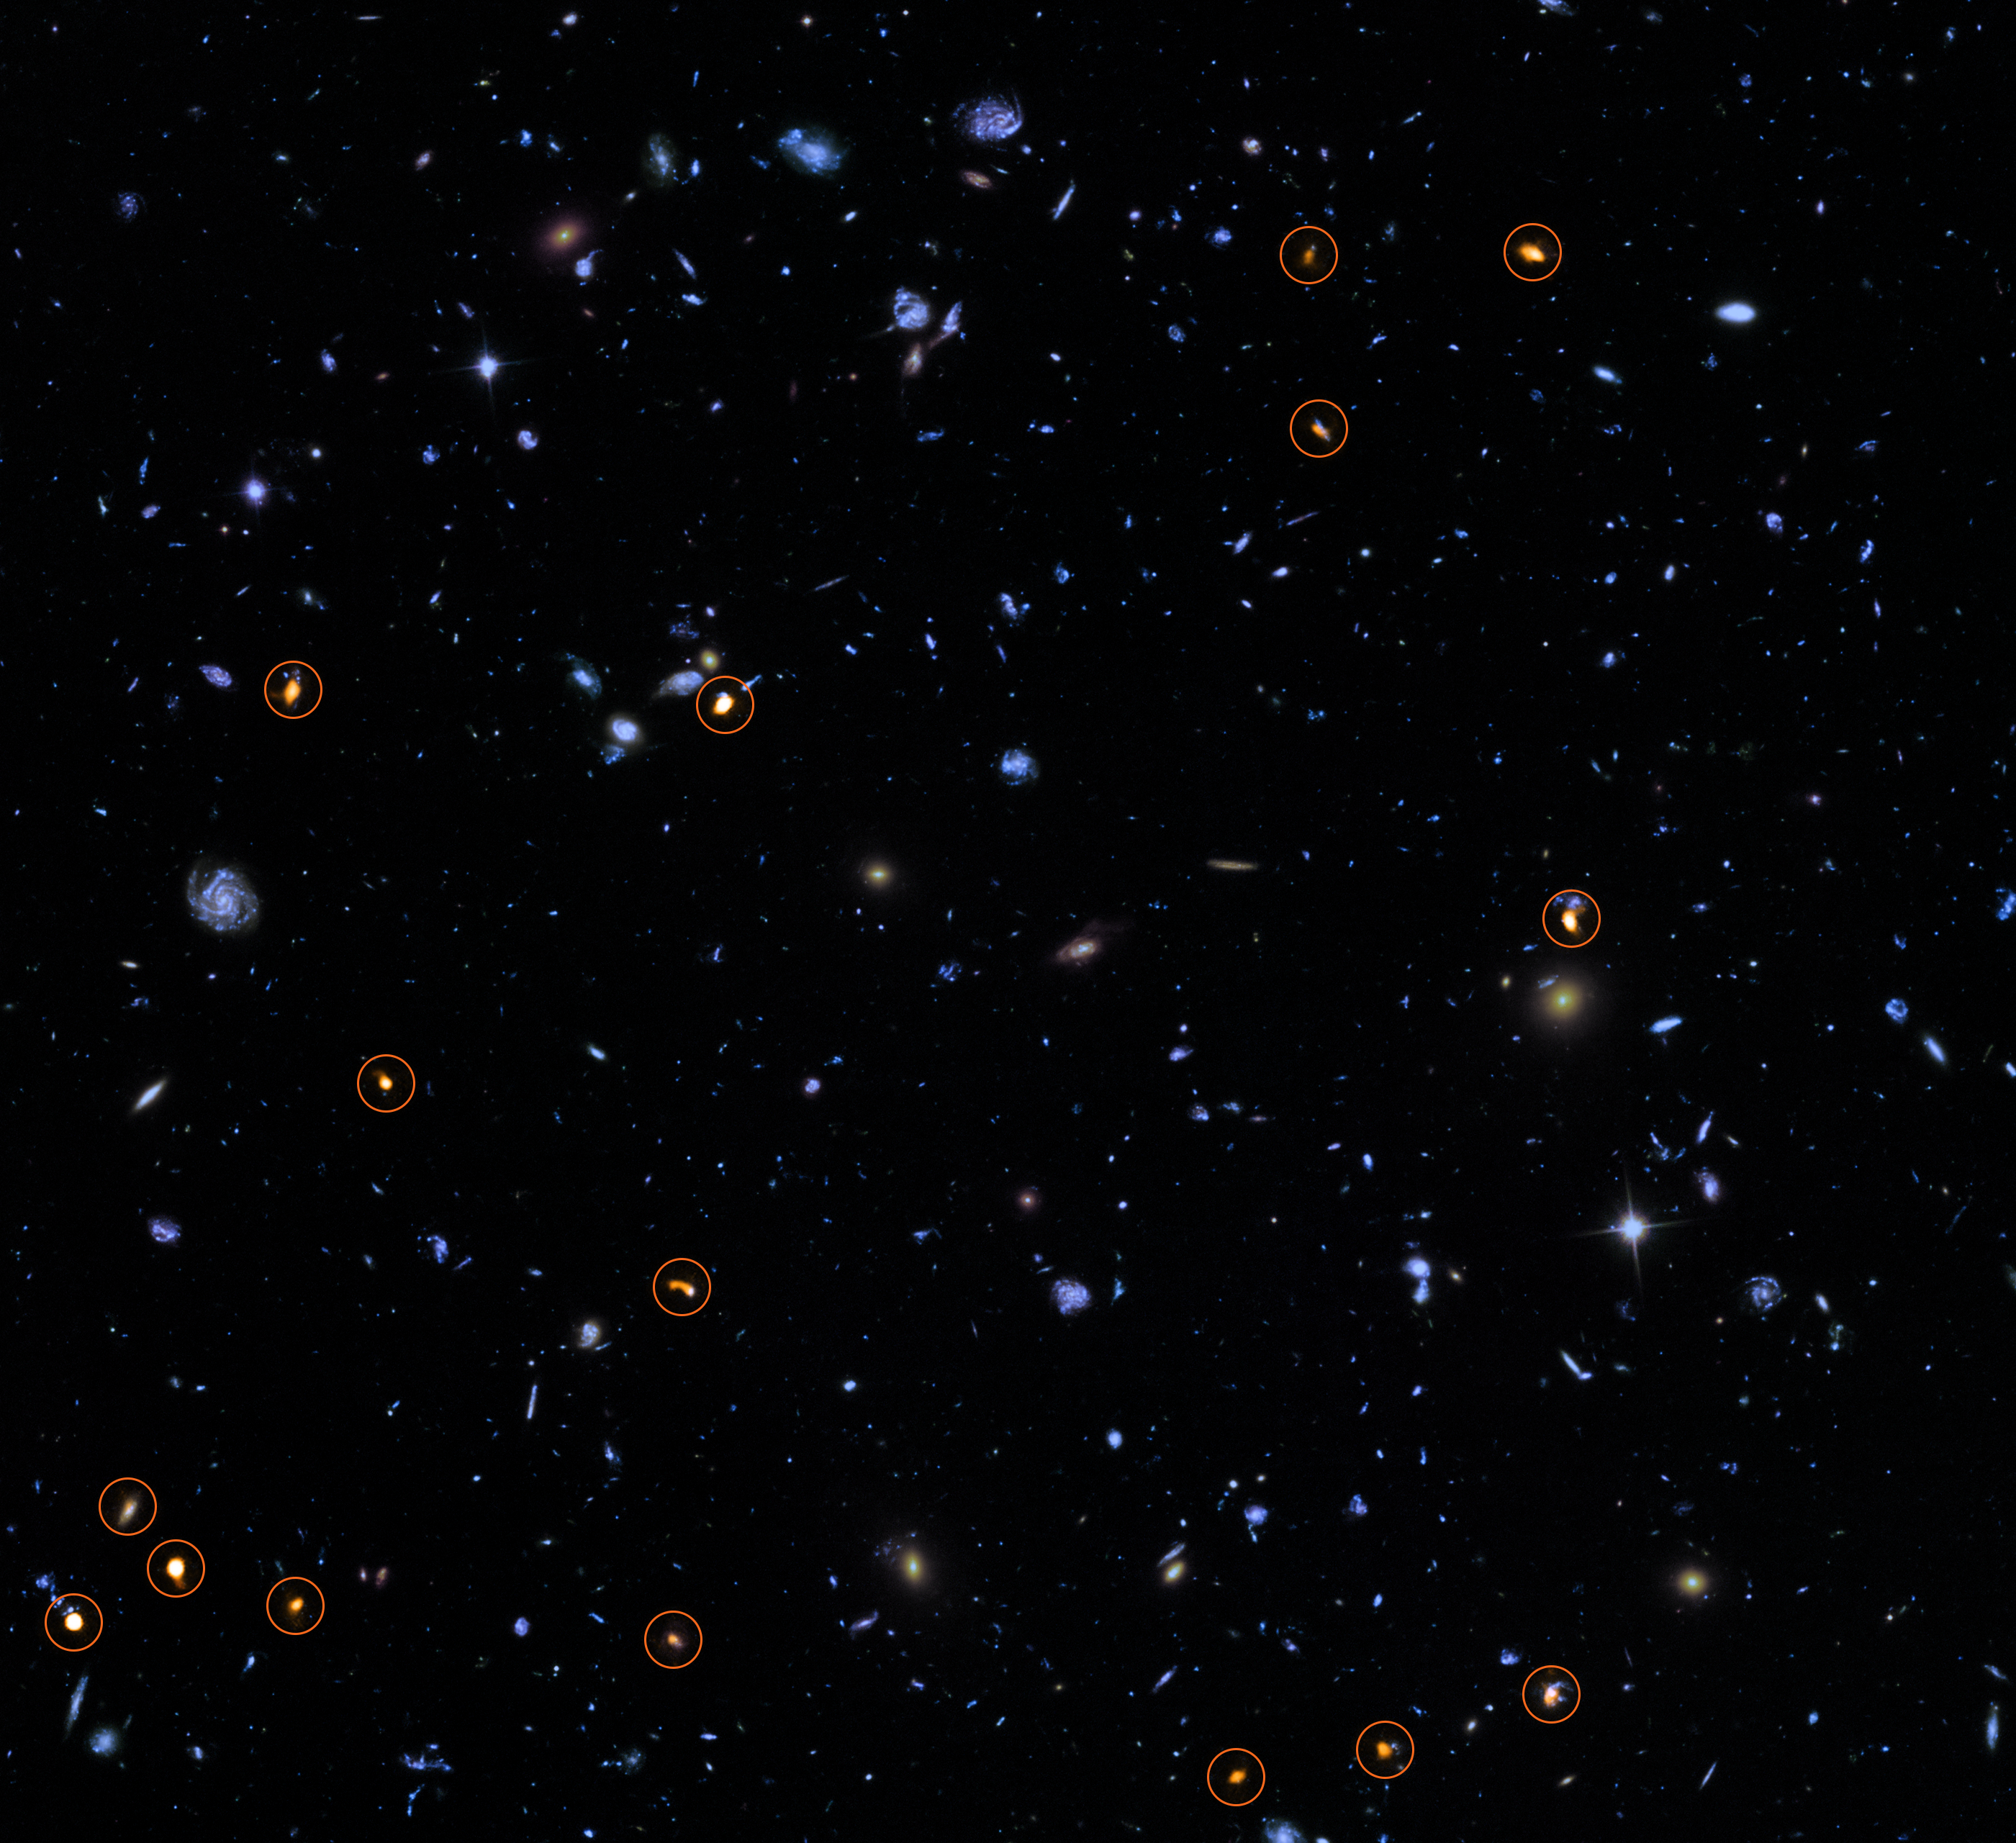

ALMA probes the Hubble Ultra Deep Field

This image combines a background picture taken by the NASA/ESA Hubble Space Telescope (blue/green) with a new very deep view of this field (orange, marked with circles) by the Atacama Large Millimeter/submillimeter Array (ALMA). All the objects that ALMA sees appear to be massive star-forming galaxies.

This image is based on the ALMA survey by J. Dunlop and colleagues, covering the full Hubble Ultra Deep Field area.

Credit: ALMA (ESO/NAOJ/NRAO)/NASA/ESA/J. Dunlop et al. and S. Beckwith (STScI) and the HUDF Team.